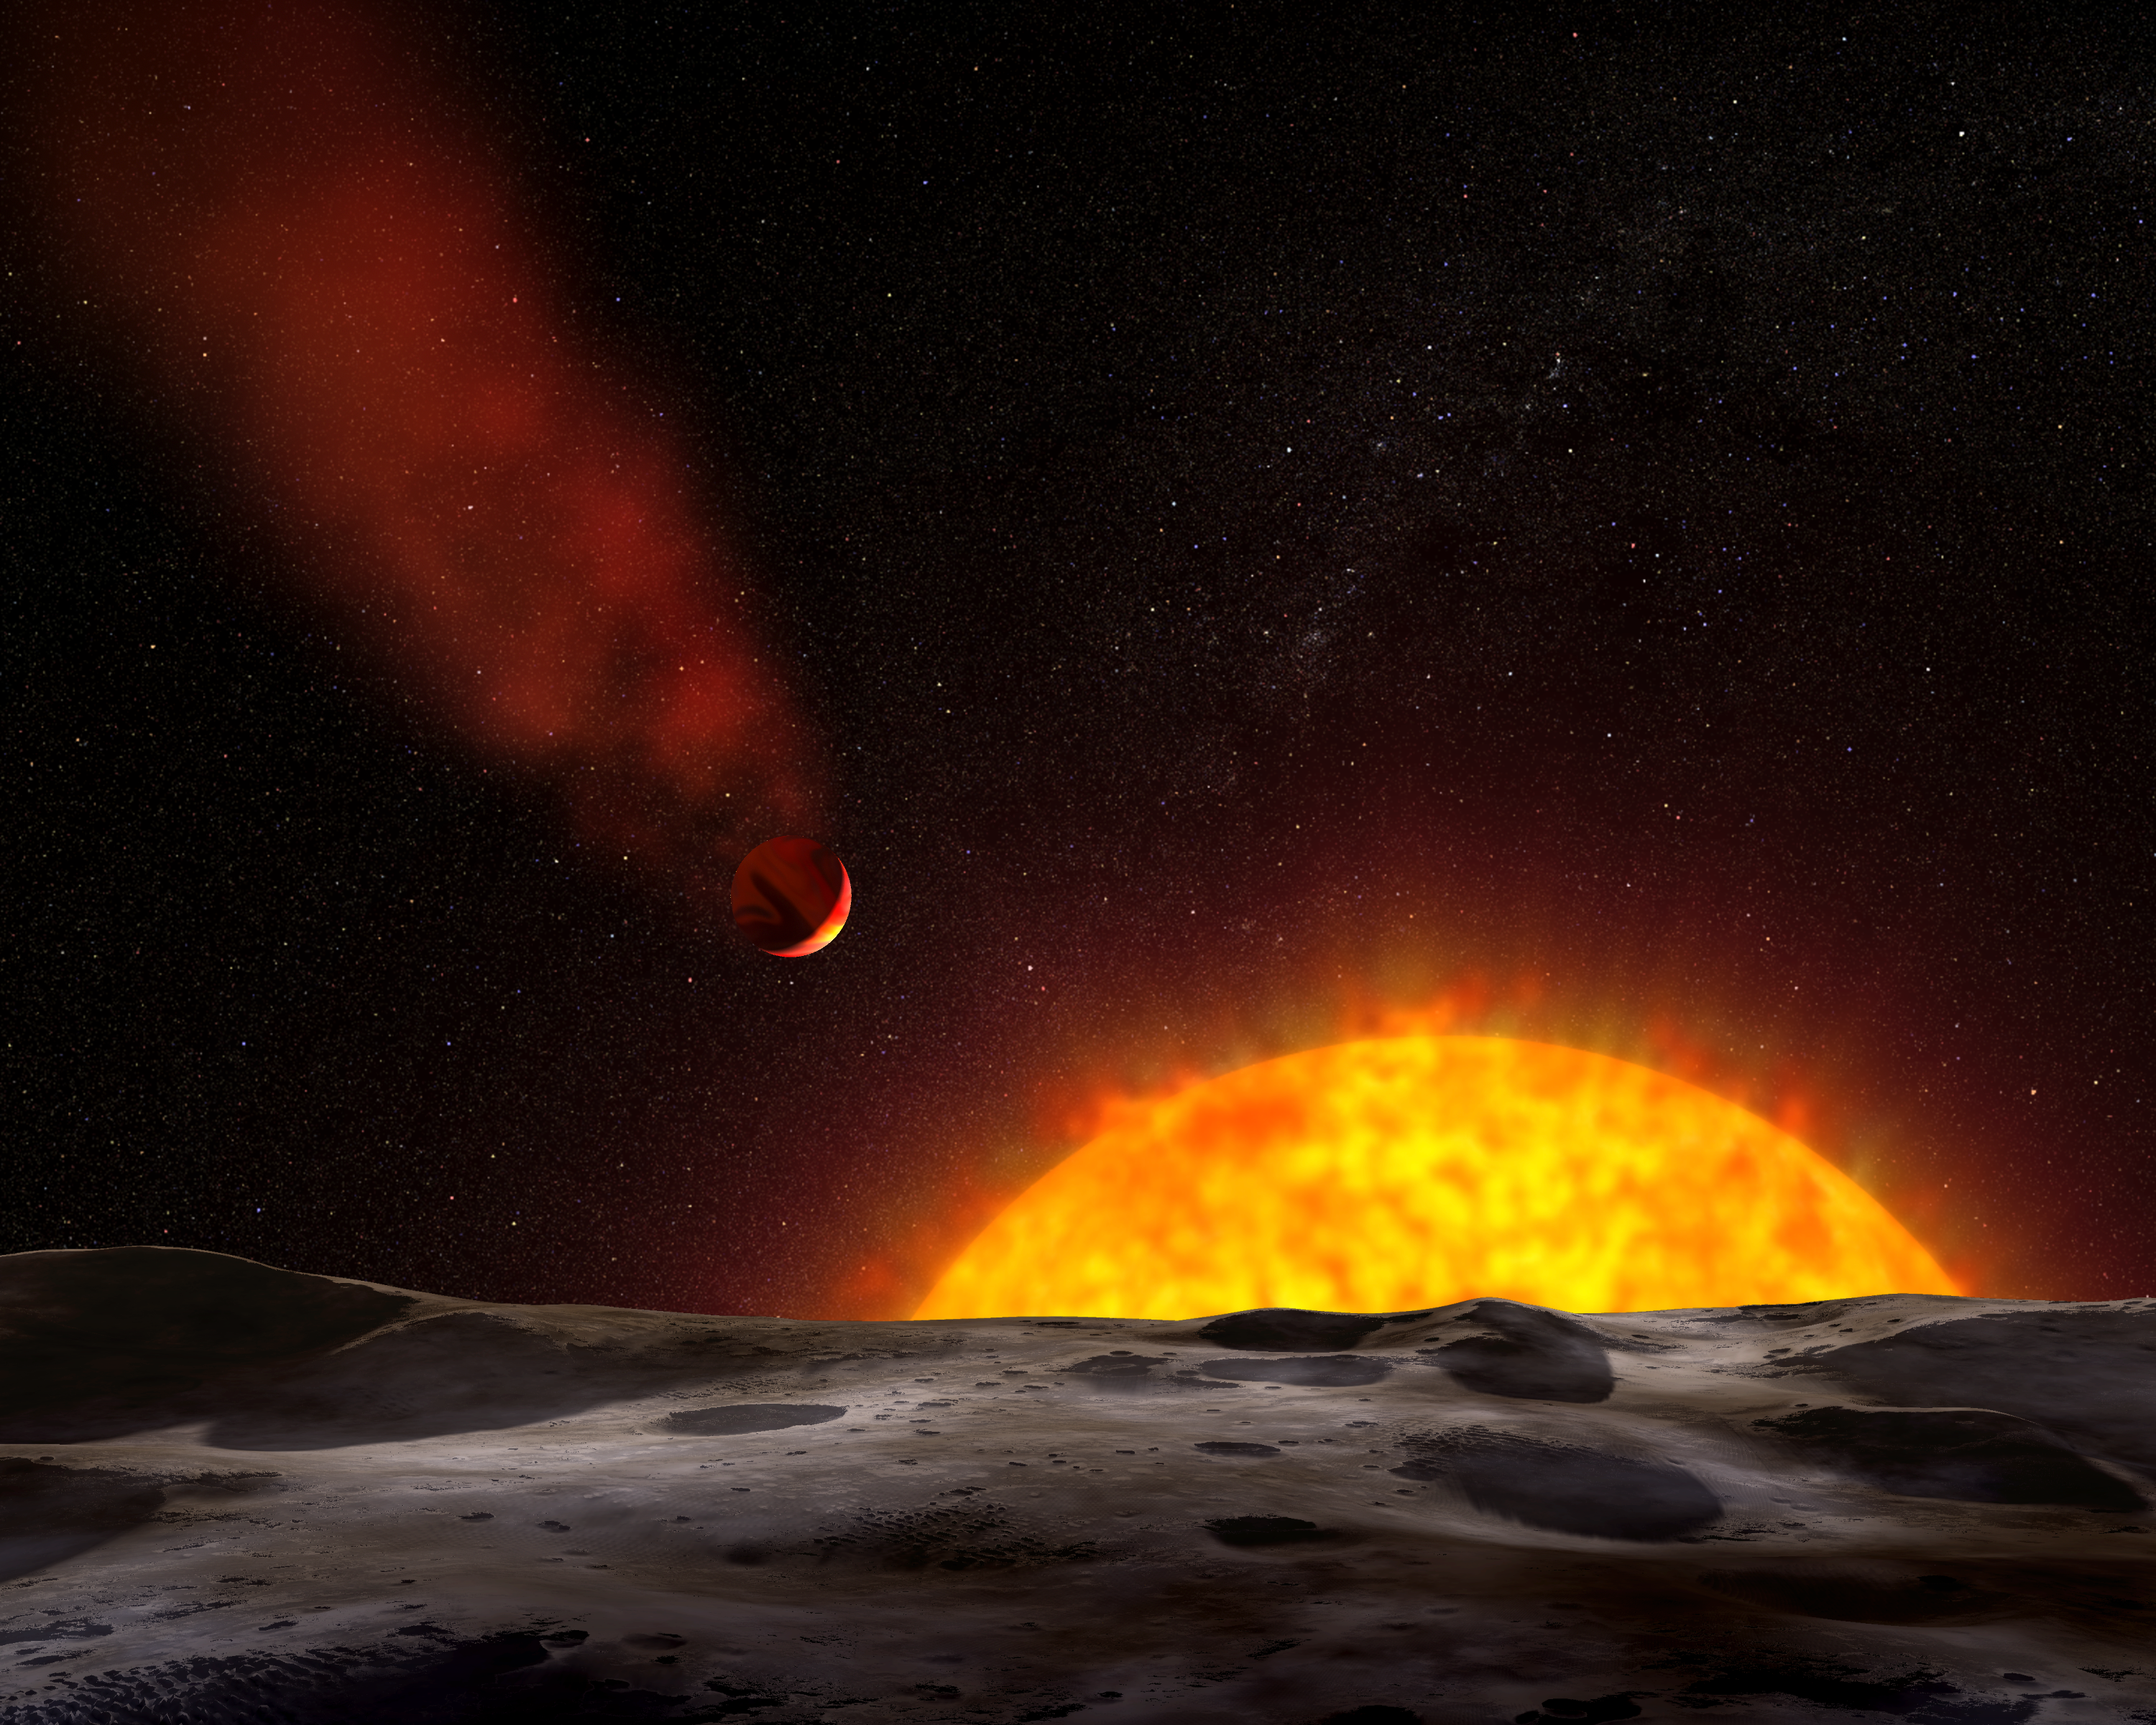

Artist's concept of exoplanet with comet-like tail

This artist's illustration shows a view of the gas giant planet HD 209458b, as seen from the surface of a hypothetical nearby companion object. The planet is orbiting so close to its sunlike star that its heated atmosphere is escaping into space. Spectroscopic observations by the new Cosmic Origins Spectrograph (COS) aboard the Hubble Space Telescope suggest that powerful stellar winds are sweeping the castoff material behind the scorched planet and shaping it into a comet-like tail.

Credit: NASA, ESA, and G. Bacon (STScI). Science Credit: J. Linsky (University of Colorado, Boulder, Colo., USA)